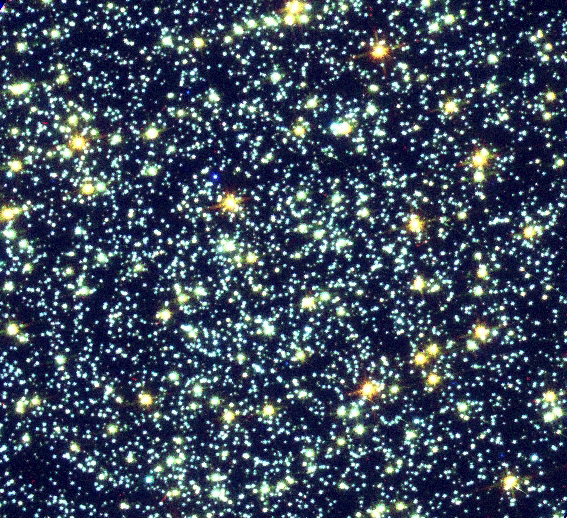

Blue Stragglers in Globular Cluster 47 Tucanae

The core of globular cluster 47 Tucanae is home to many blue stragglers, rejuvenated stars that glow with the blue light of young stars. This ground-based telescope image shows the entire crowded core of 47 Tucanae, located 15, 000 light-years away in the constellation Tucana.

Credit: Rex Saffer (Villanova University) and Dave Zurek (STScI), and NASA/ESA